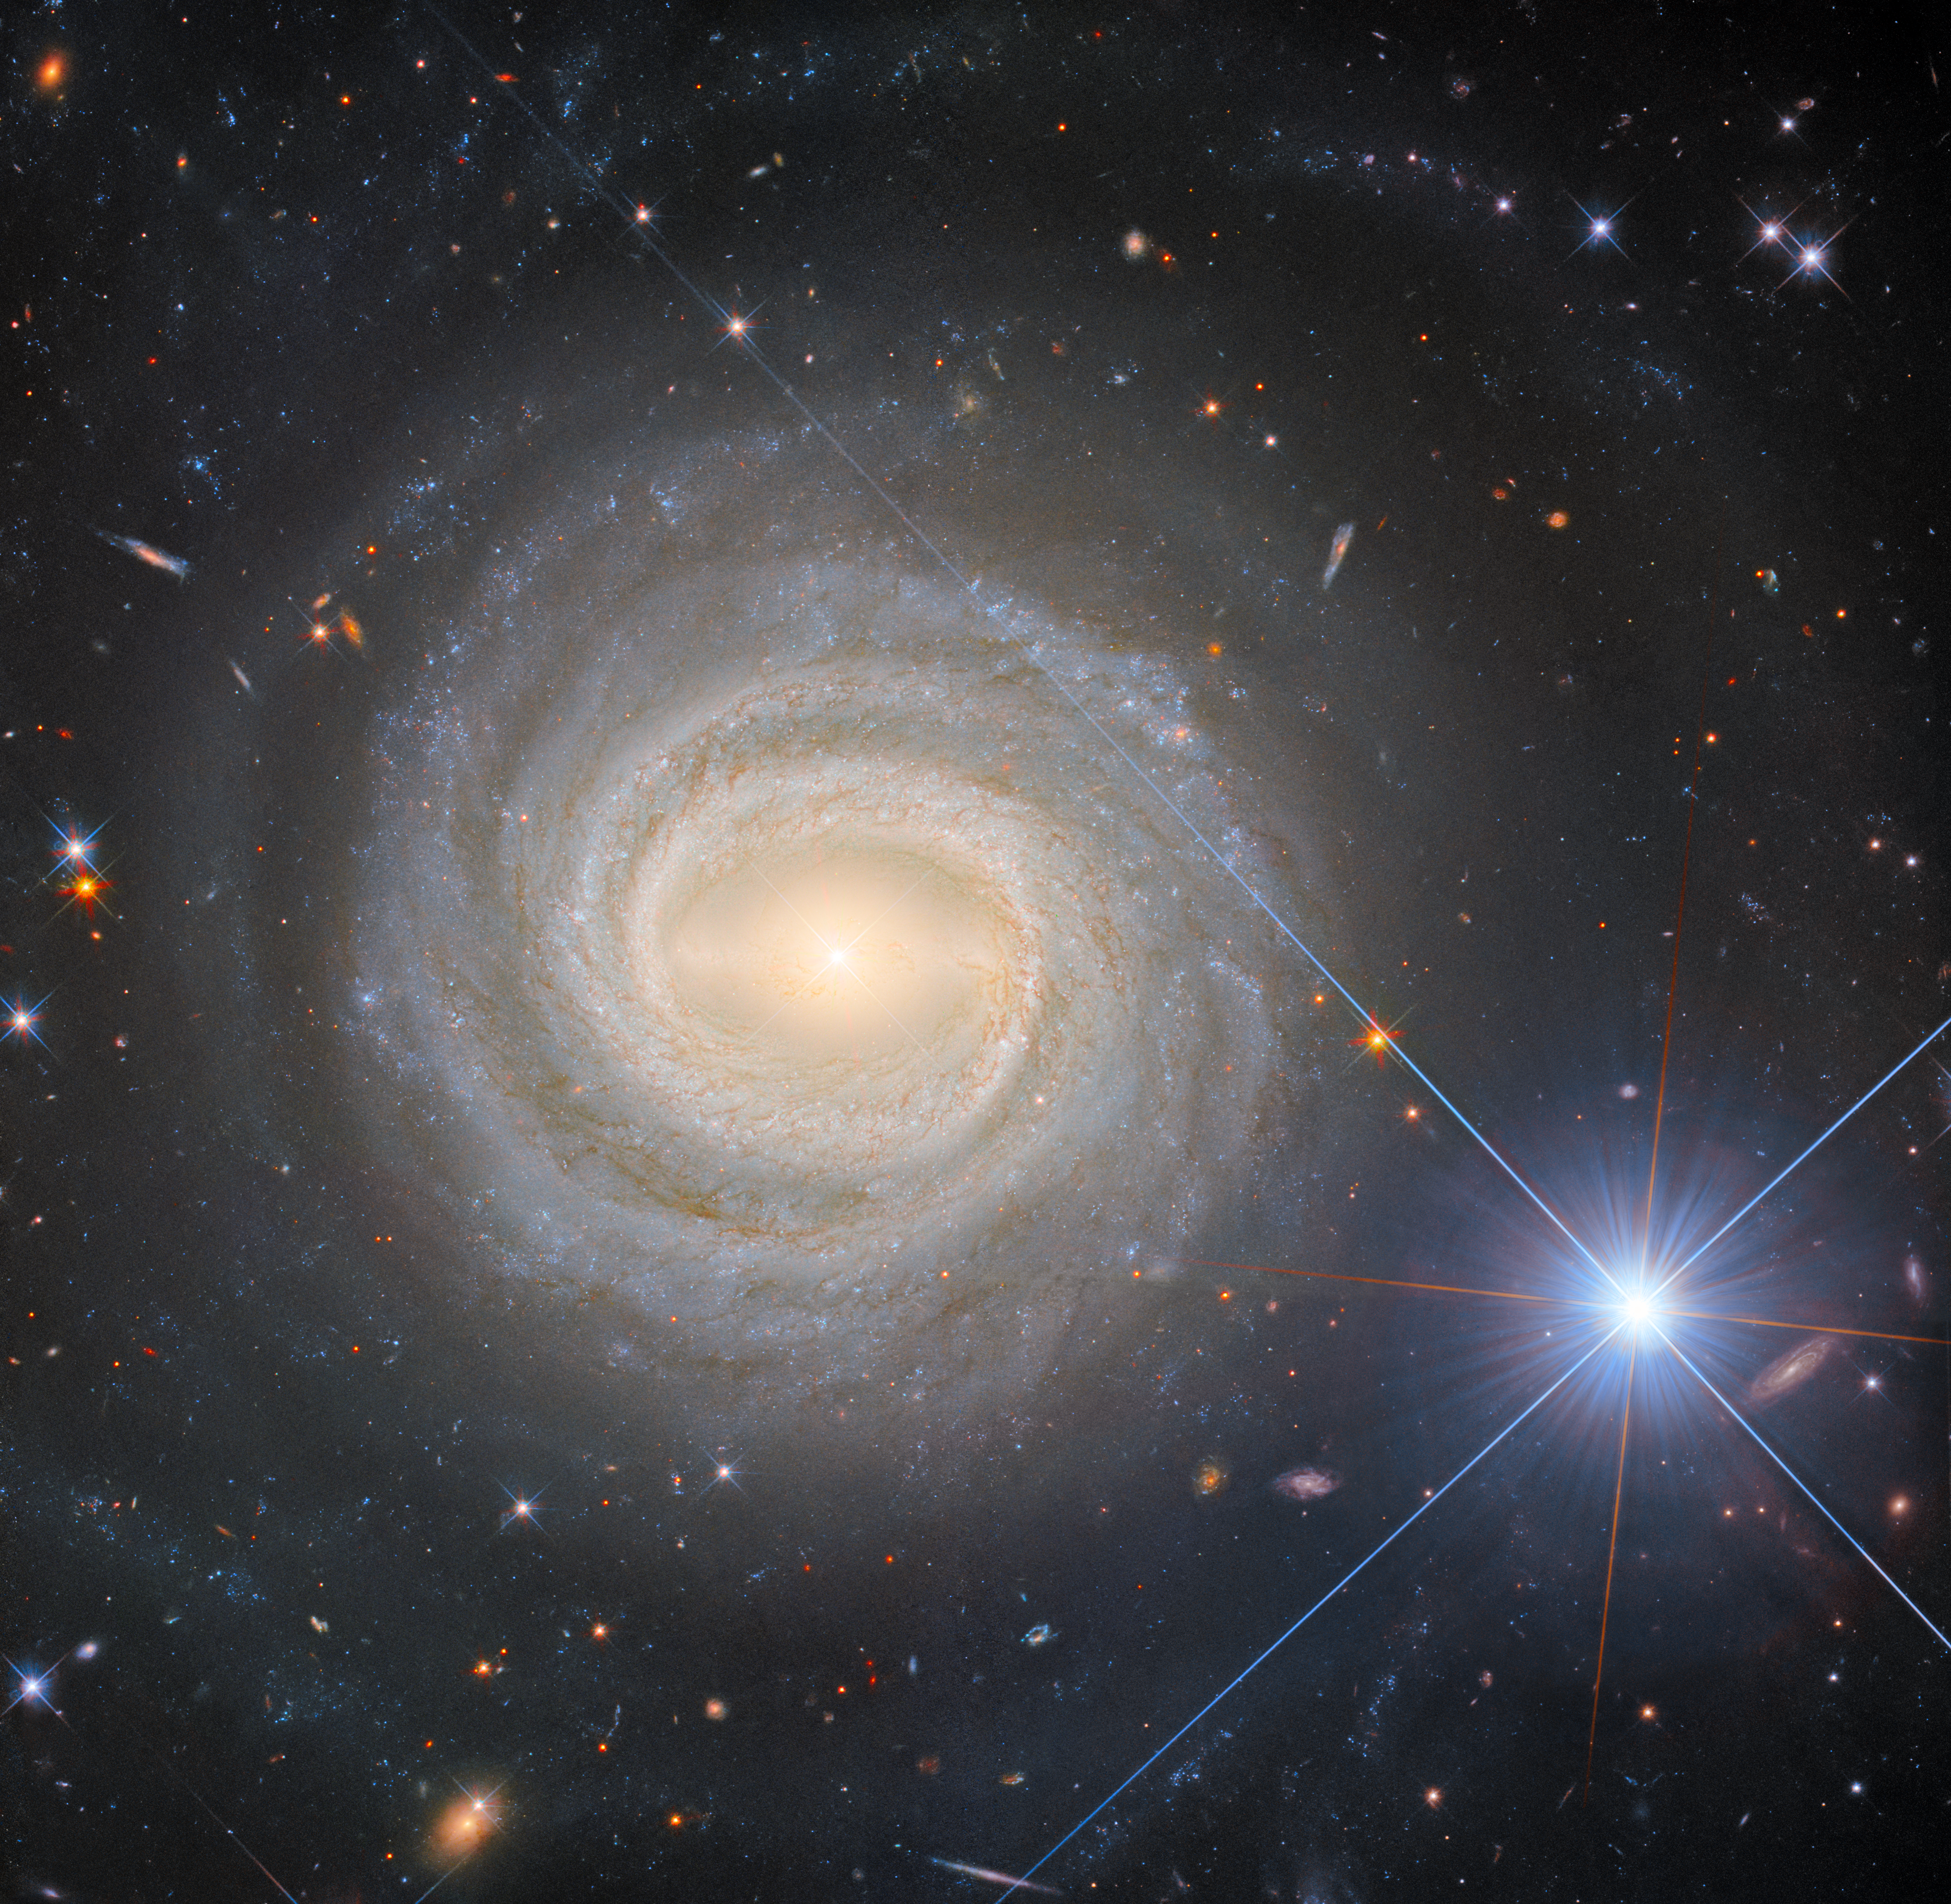

The eponymous NGC 3783

This image features NGC 3783, a bright barred spiral galaxy about 130 million light-years from Earth, that also lends its name to the eponymous NGC 3783 galaxy group. Like galaxy clusters, galaxy groups are aggregates of gravitationally bound galaxies. Galaxy groups, however, are less massive and contain fewer members than galaxy clusters do: where galaxy clusters can contain hundreds or even thousands of constituent galaxies, galaxy groups do not typically include more than 50. The Milky Way is actually part of a galaxy group, known as the Local Group, which contains two other large galaxies (Andromeda and the Triangulum galaxy), as well as several dozen satellite and dwarf galaxies. The NGC 3783 galaxy group, meanwhile, contains 47 galaxies. It also seems to be at a fairly early stage of its evolution, making it an interesting object of study.

Whilst the focus of this image is the spiral galaxy NGC 3783, the eye is equally drawn to the very bright object in the lower right part of this image. This is the star HD 101274. The perspective in this image makes the star and the galaxy look like close companions, but this is an illusion. HD 101274 lies only about 1530 light-years from Earth, meaning it is about 85 thousand times closer than NGC 3783. This explains how a single star can appear to outshine an entire galaxy!

NGC 3783 is a type-1 Seyfert galaxy, which is a galaxy with a bright central region — so it’s particularly bright itself, as far as galaxies go. In this image it is recorded by Hubble in incredible detail, from its glowing central bar to its narrow, winding arms and the dust threaded through them, thanks to five separate images taken in different wavelengths of light. In fact, the galactic centre is bright enough to Hubble that it exhibits diffraction spikes, normally only seen on stars such as HD 101274.

Credit: ESA/Hubble & NASA, M. C. Bentz, D. J. V. Rosario